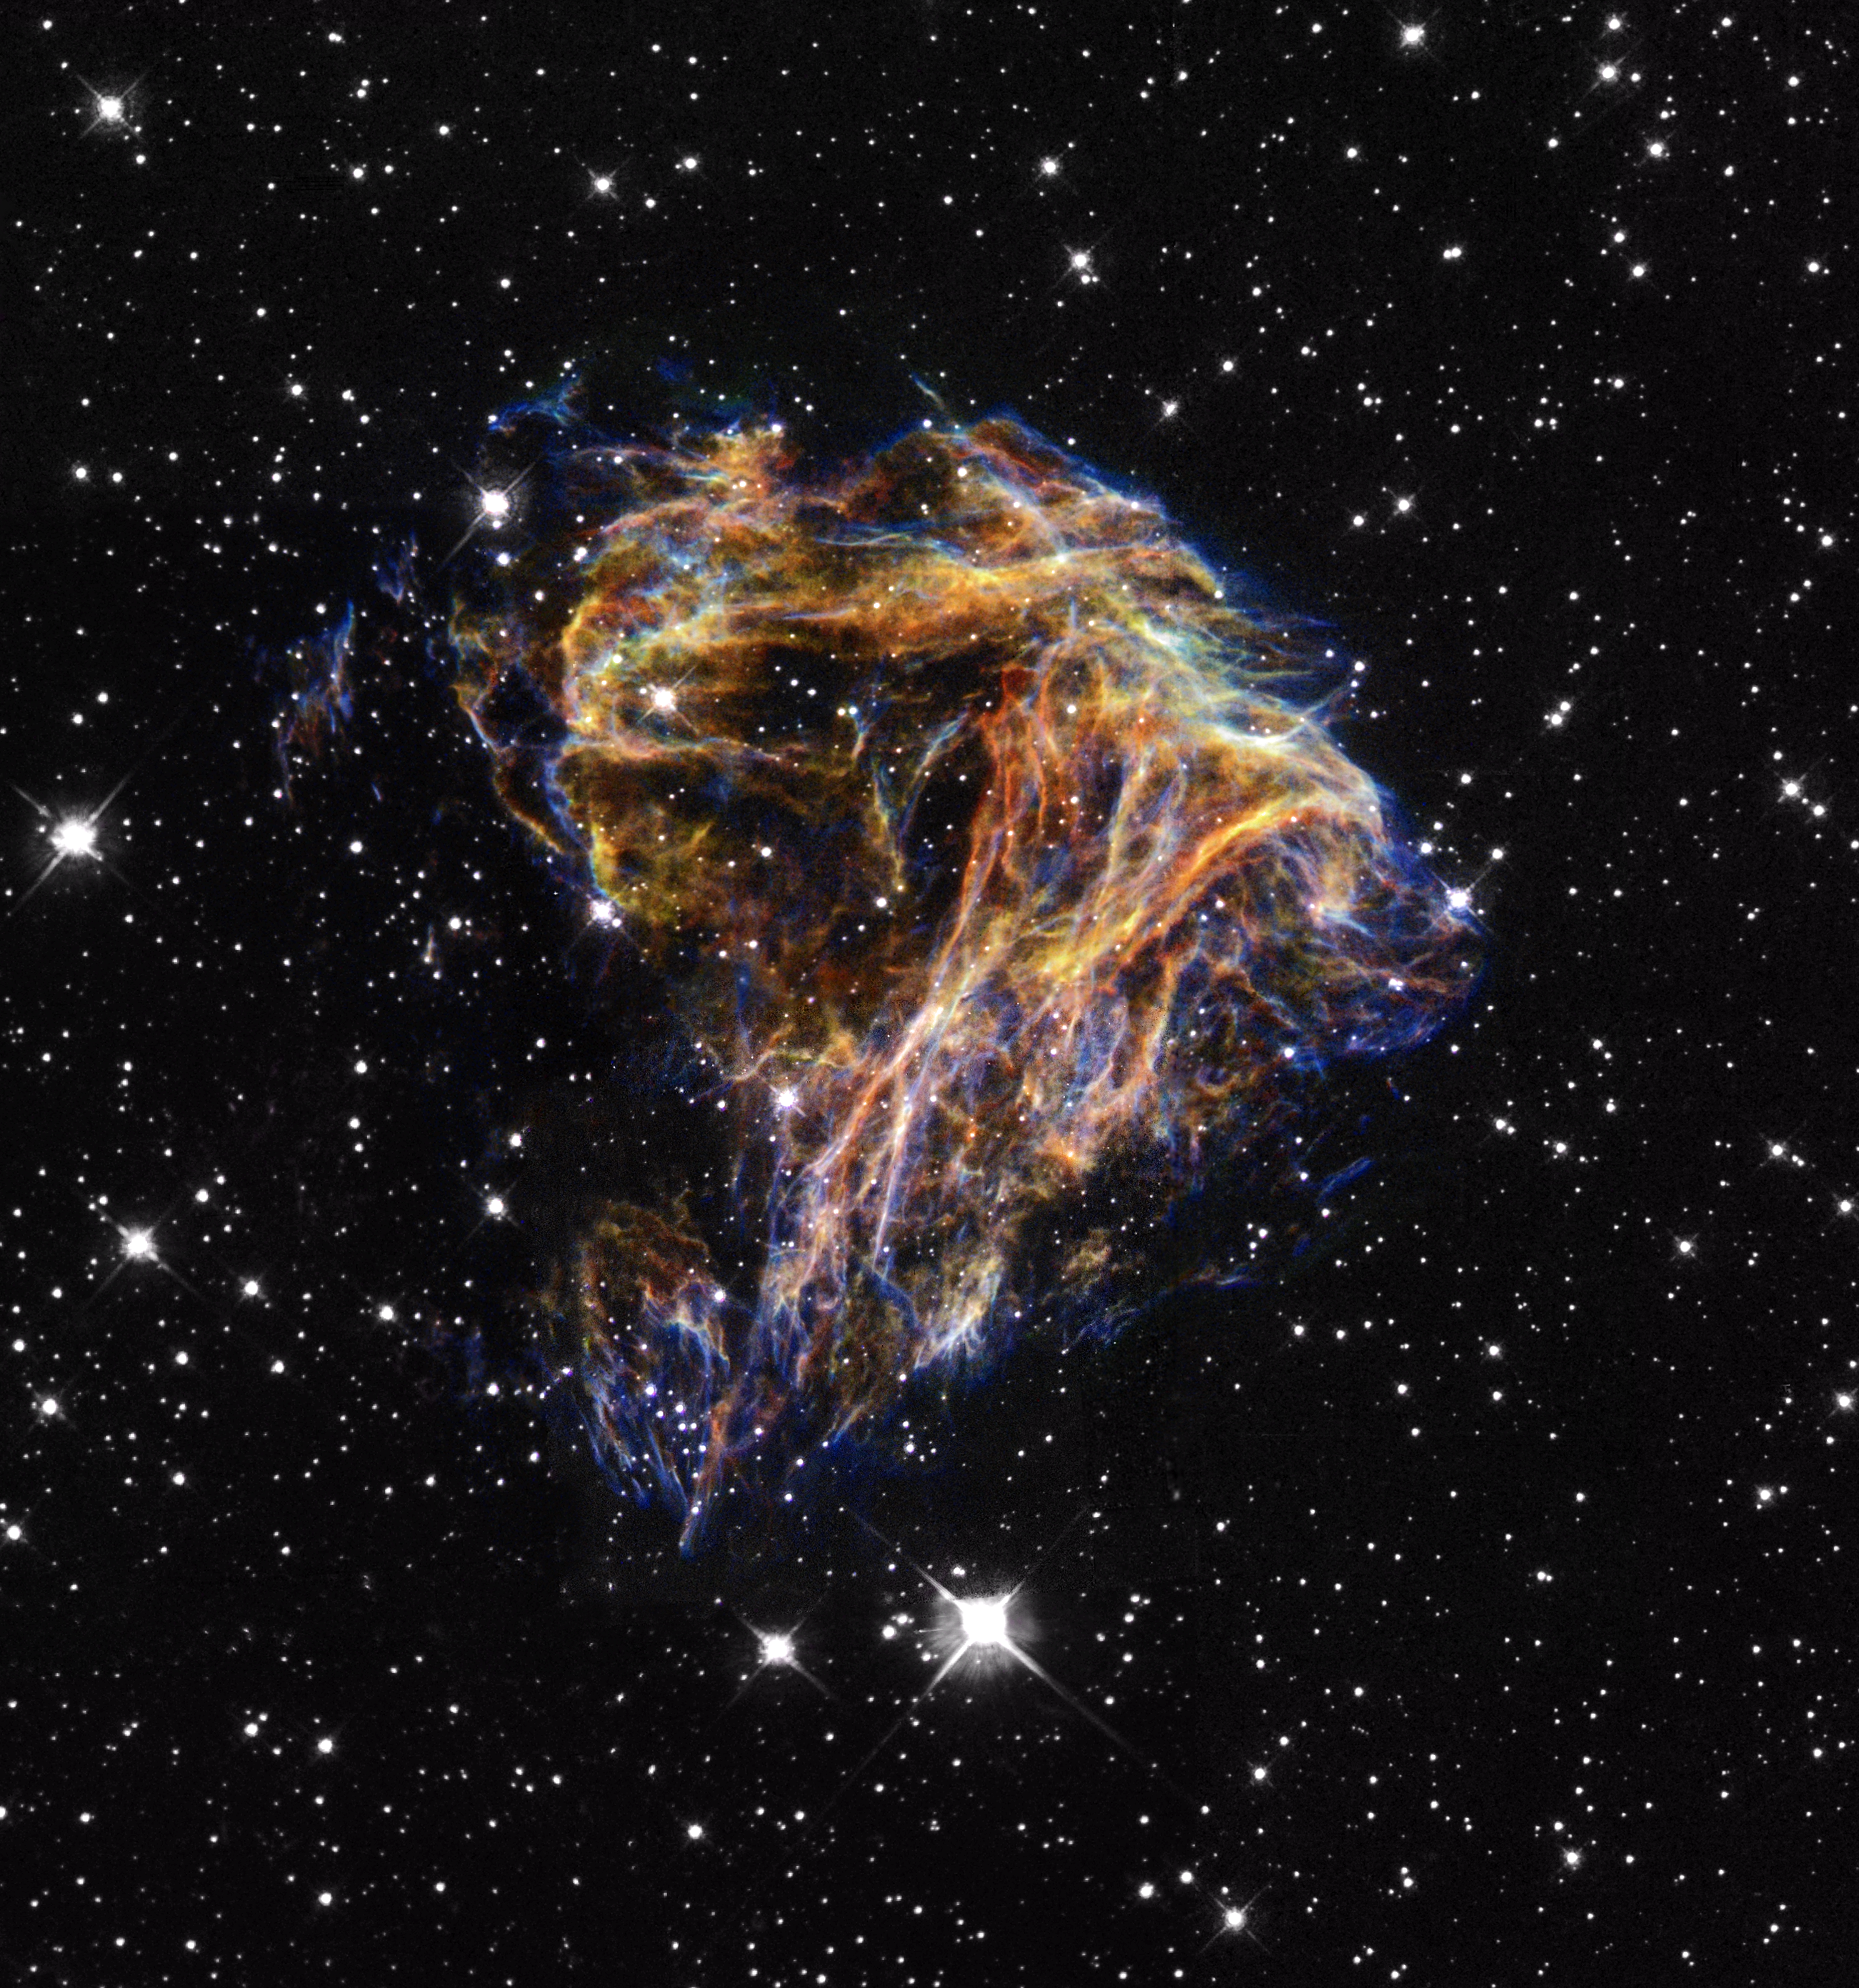

Celestial fireworks

Resembling the puffs of smoke and sparks from a summer fireworksdisplay in this image from NASA/ESA Hubble Space Telescope, these delicate filaments are actually sheets of debris from a stellar explosion in a neighboring galaxy. Hubble's target was a supernova remnant within the Large Magellanic Cloud (LMC), a nearby, small companion galaxy to the Milky Way visible from the southern hemisphere.

Denoted N 49, or DEM L 190, this remnant is from a massive star that died in a supernova blast whose light would have reached Earth thousands of years ago. This filamentary material will eventually be recycled into building new generations of stars in the LMC. Our own Sun and planets are constructed from similar debris of supernovae that exploded in the Milky Way billions of years ago.

Credit: NASA/ESA and The Hubble Heritage Team (STScI/AURA)